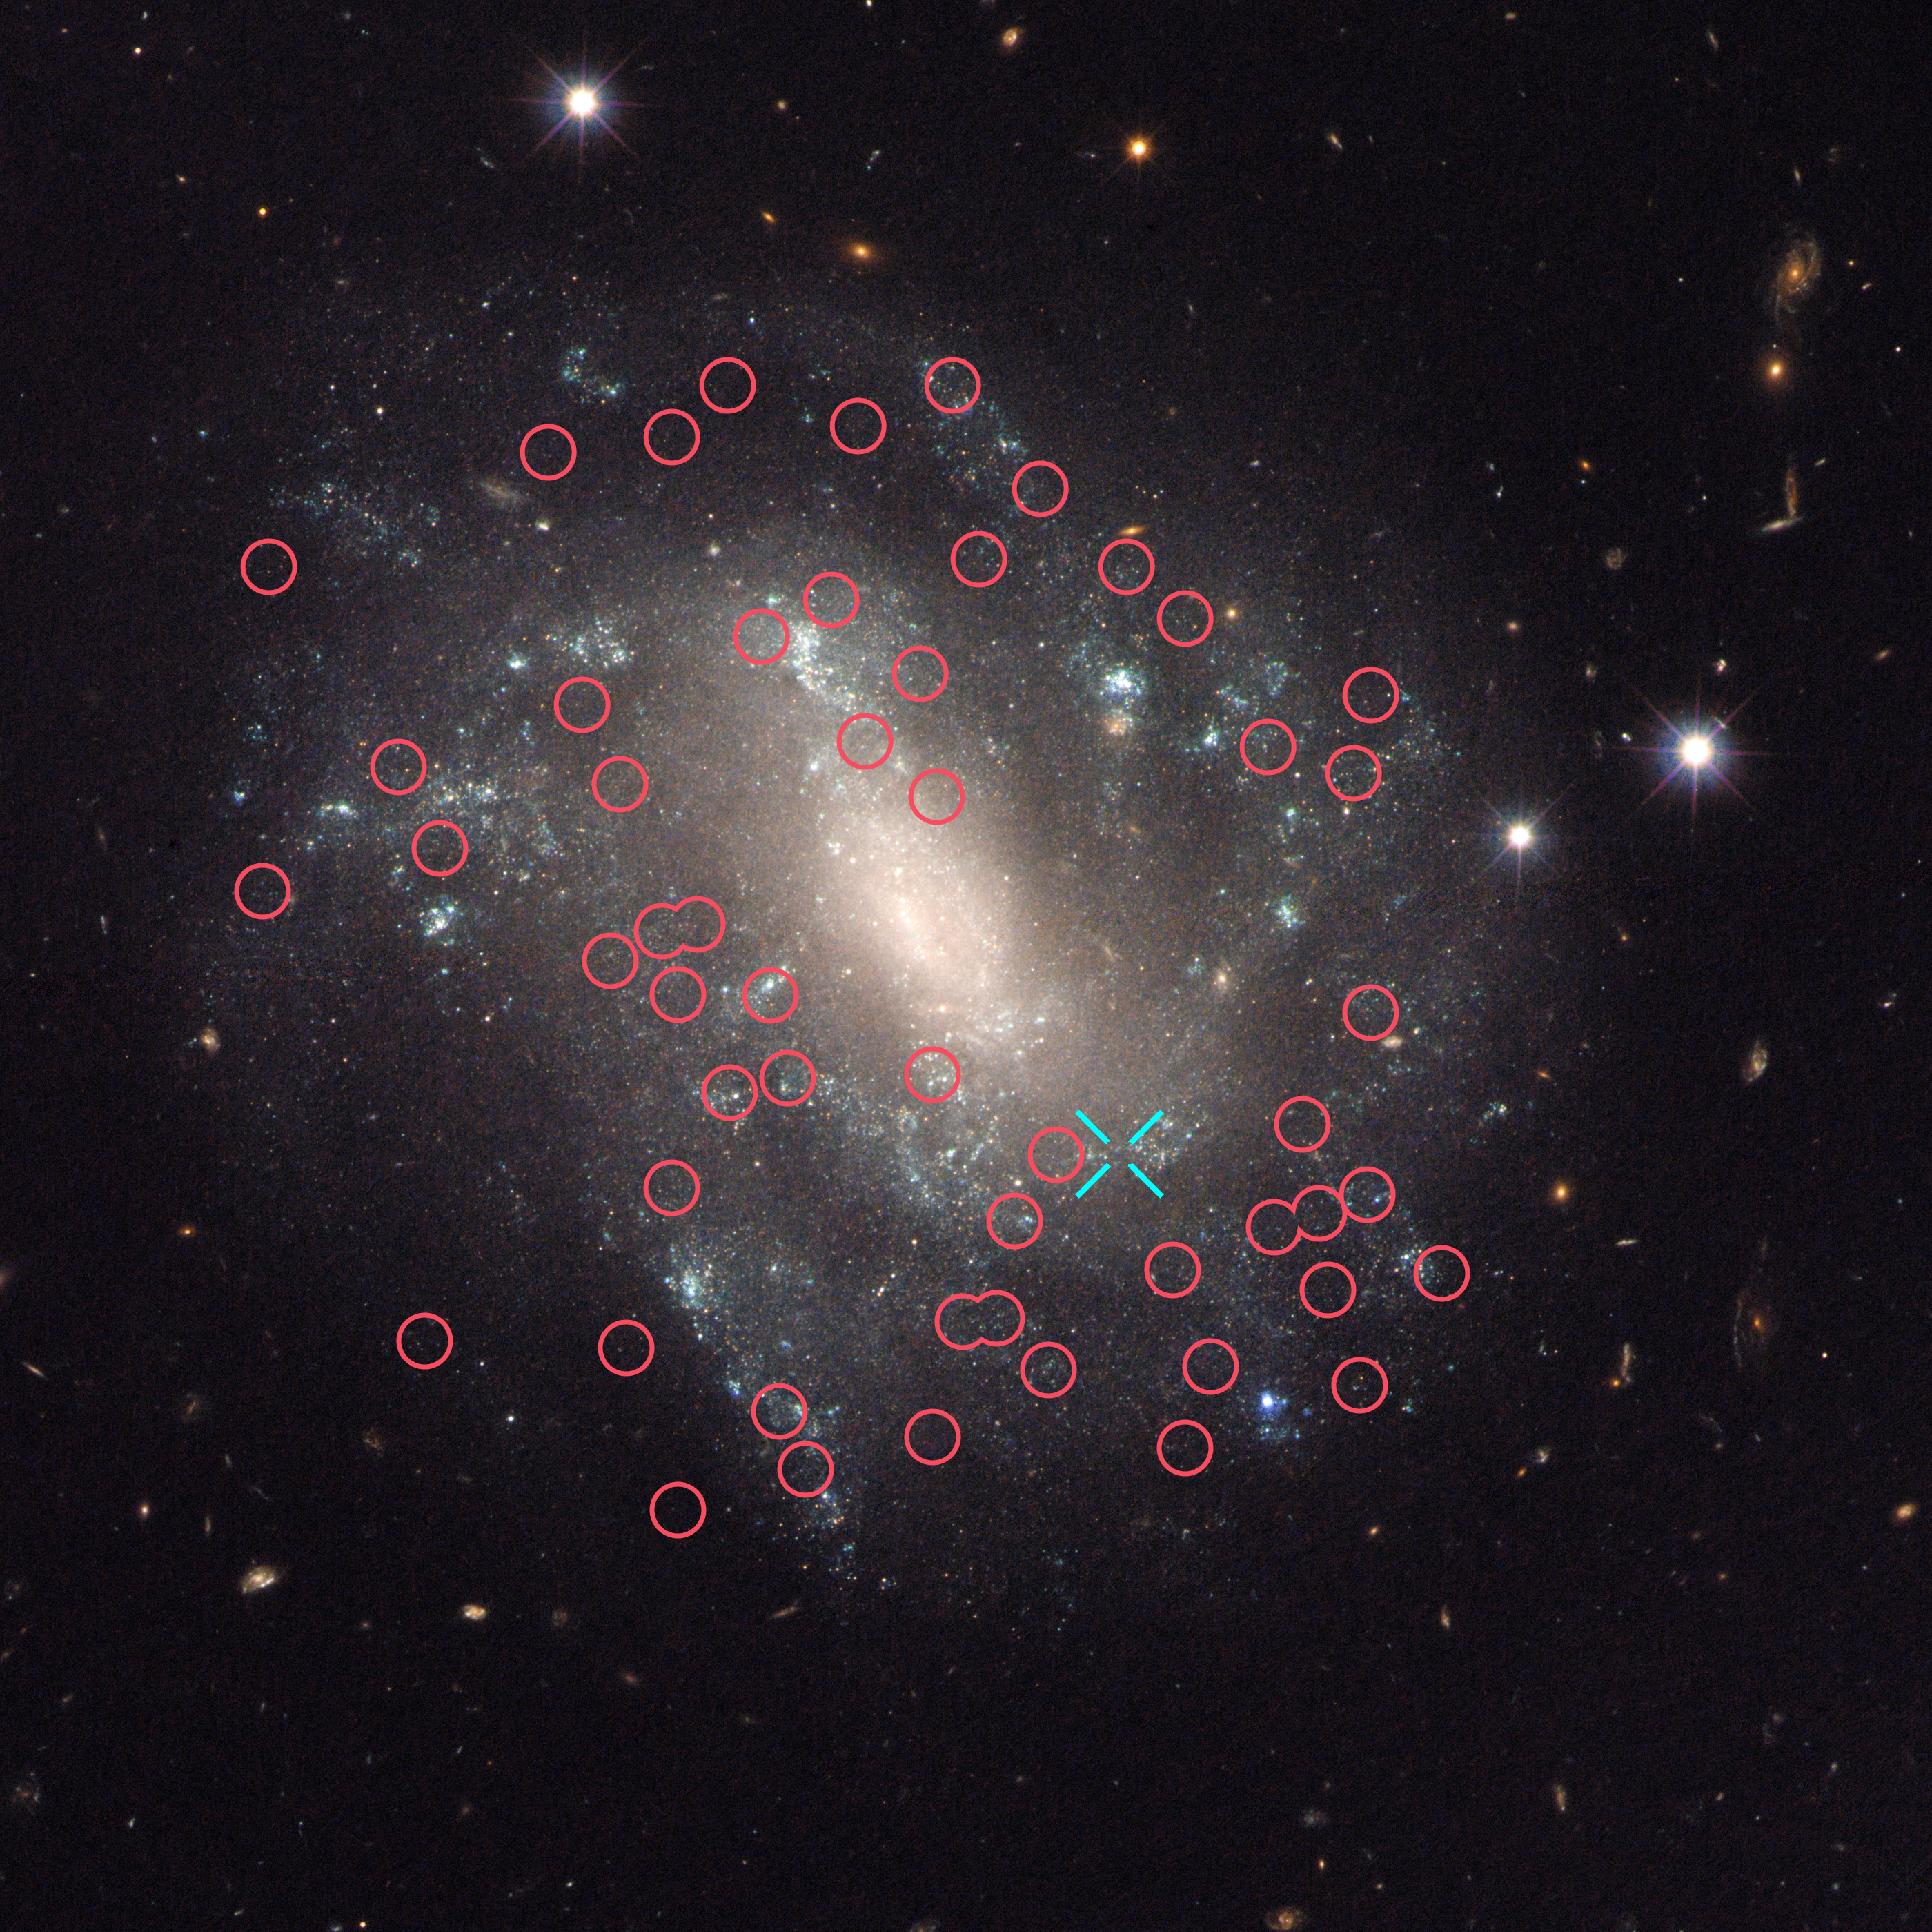

Cepheids in UGC 9391

This image taken with the NASA/ESA Hubble Space Telescope shows one of the galaxies in the survey to refine the measurement for how fast the Universe expands with time, called the Hubble constant.

The galaxy, UGC 9391, contains two types of stars that astronomers use to calculate accurate distances to galaxies, a key measurement in determining the Hubble constant: Cepheid variables (marked with red circles) which pulsate at rates that correspond to their true brightness; and a Type Ia supernova (the blue cross indicates the position of the supernova 2003du). These supernovae are another commonly used cosmic yardstick. They flare with the same brightness and are brilliant enough to be seen from relatively longer distances.

Astronomers calibrate the supernovae with the Cepheids in galaxies such as UGC 9391 so that they can accurately calculate the distances to faraway exploding stars. UGC 9391 itself resides about 130 million light-years from Earth.

Credit: NASA, ESA, and A. Riess (STScI/JHU)